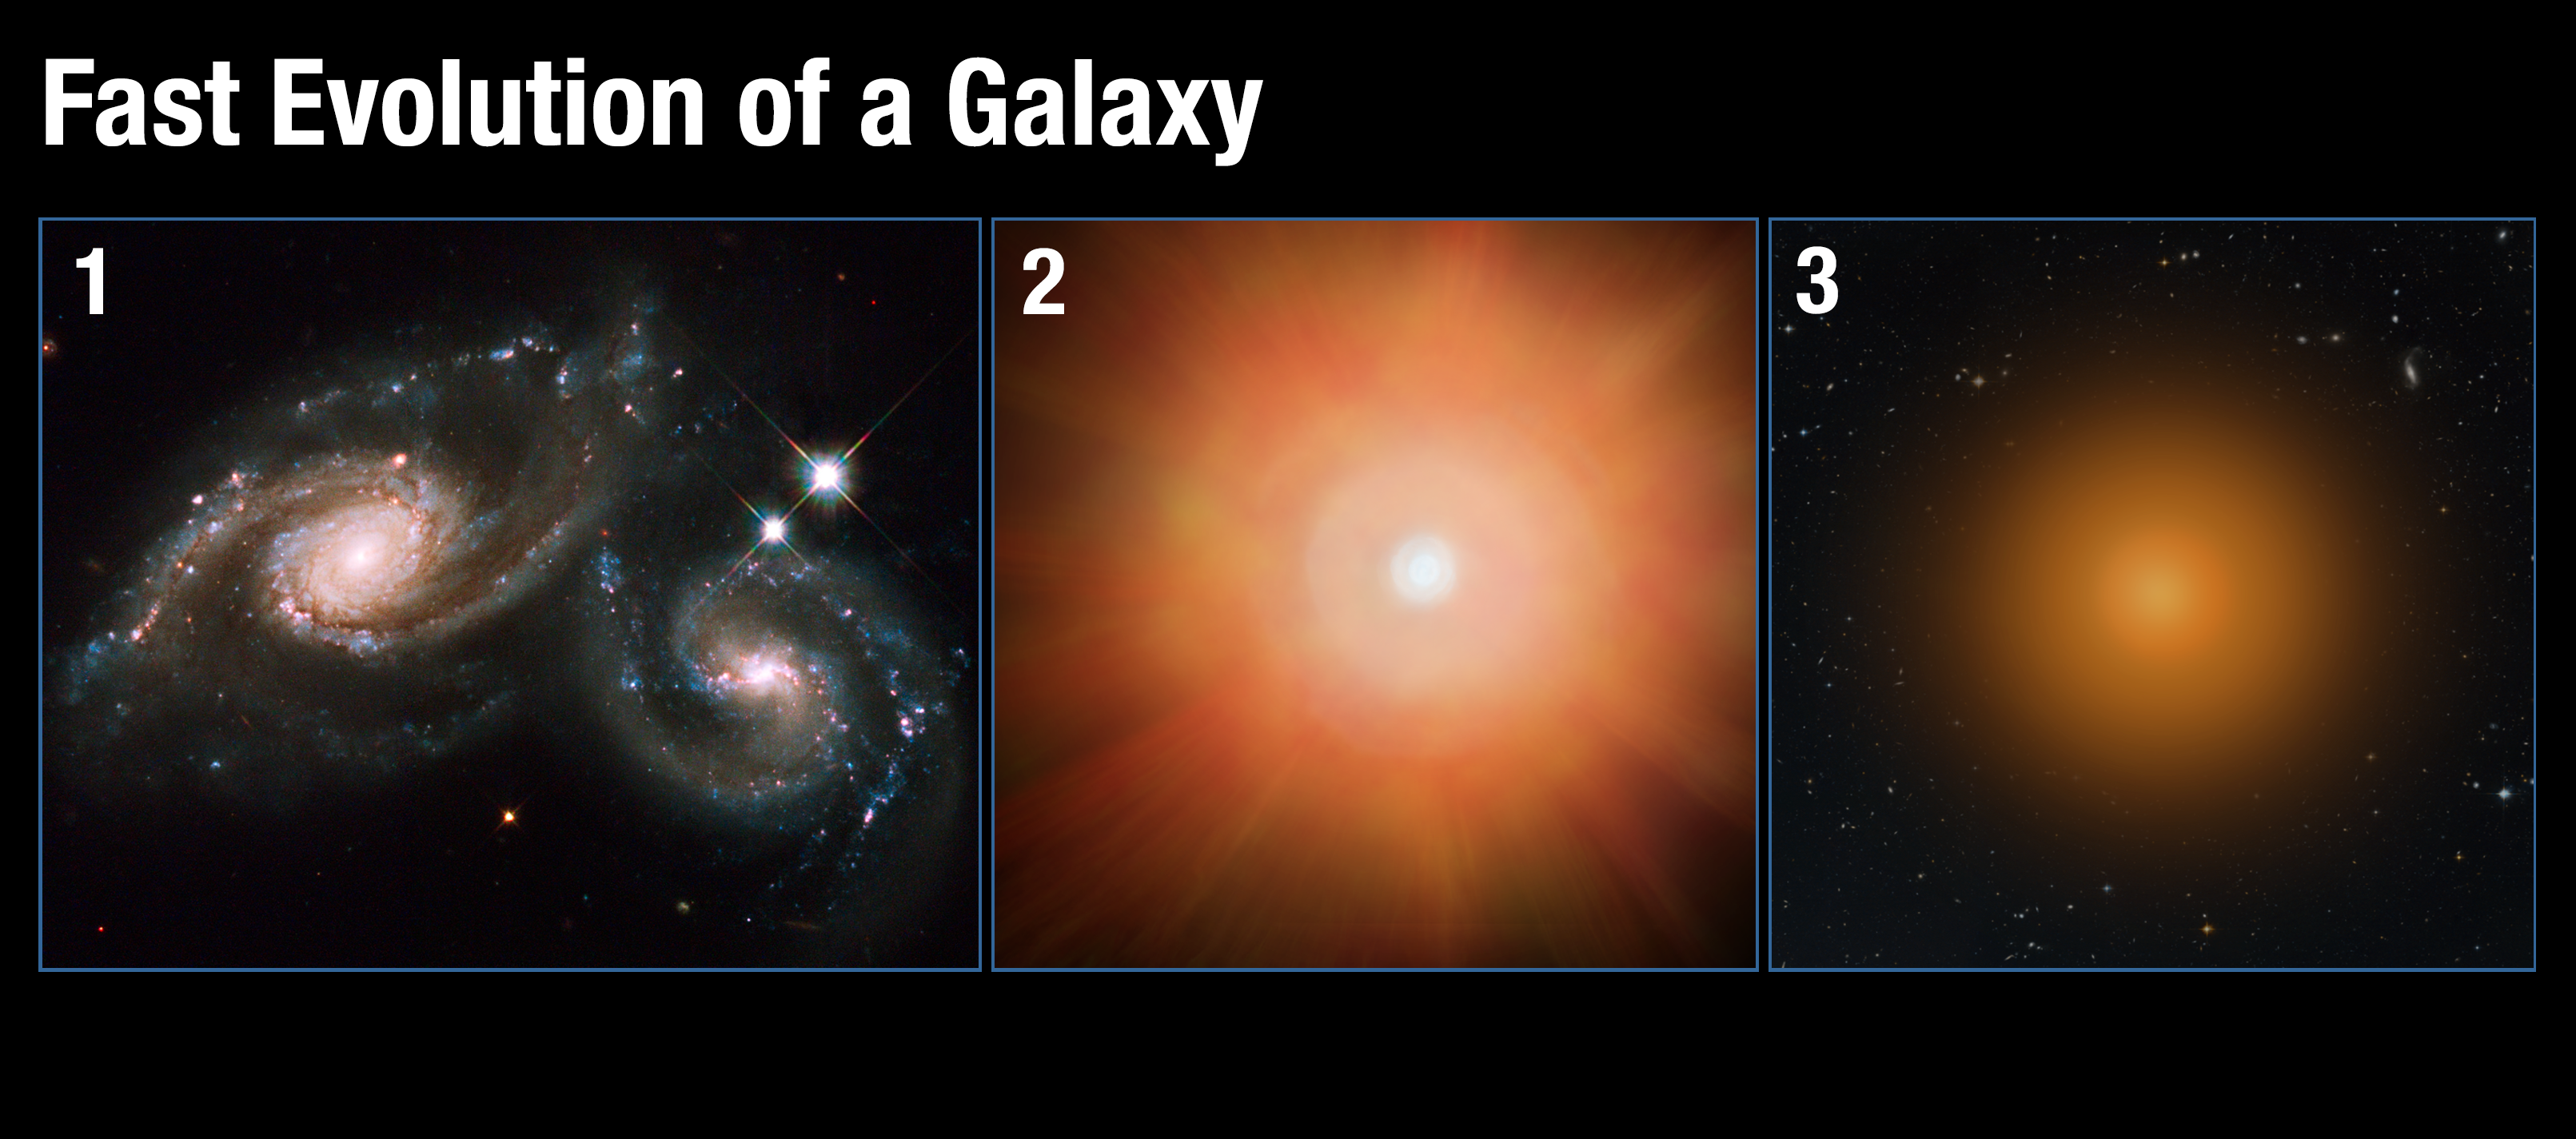

Fast evolution of a galaxy

This graphic illustrates how a vibrant, star-forming galaxy quickly transforms into a sedate galaxy composed of old stars. The scenario begins when two galaxies merge (Panel 1), funneling a large amount of gas into the central region. The gas compresses, sparking a firestorm of star birth, which blows out most of the remaining star-forming gas (Panel 2). Devoid of its fuel, the galaxy settles into a quiet existence, composed of aging stars (Panel 3).

Credit: NASA, ESA, and A. Feild (STScI) Science Credit: P. Sell (Texas Tech University)